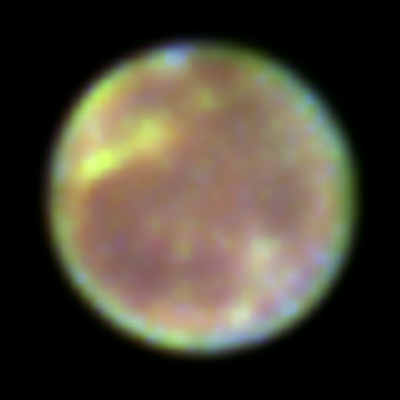

Ganymede

Over the past year Hubble has identified ozone on the surface of Ganymede. Ganymede is one of the four largest Galilean satellites.

Credit: K. Noll (STScI), J. Spencer (Lowell Observatory), and NASA/ESA